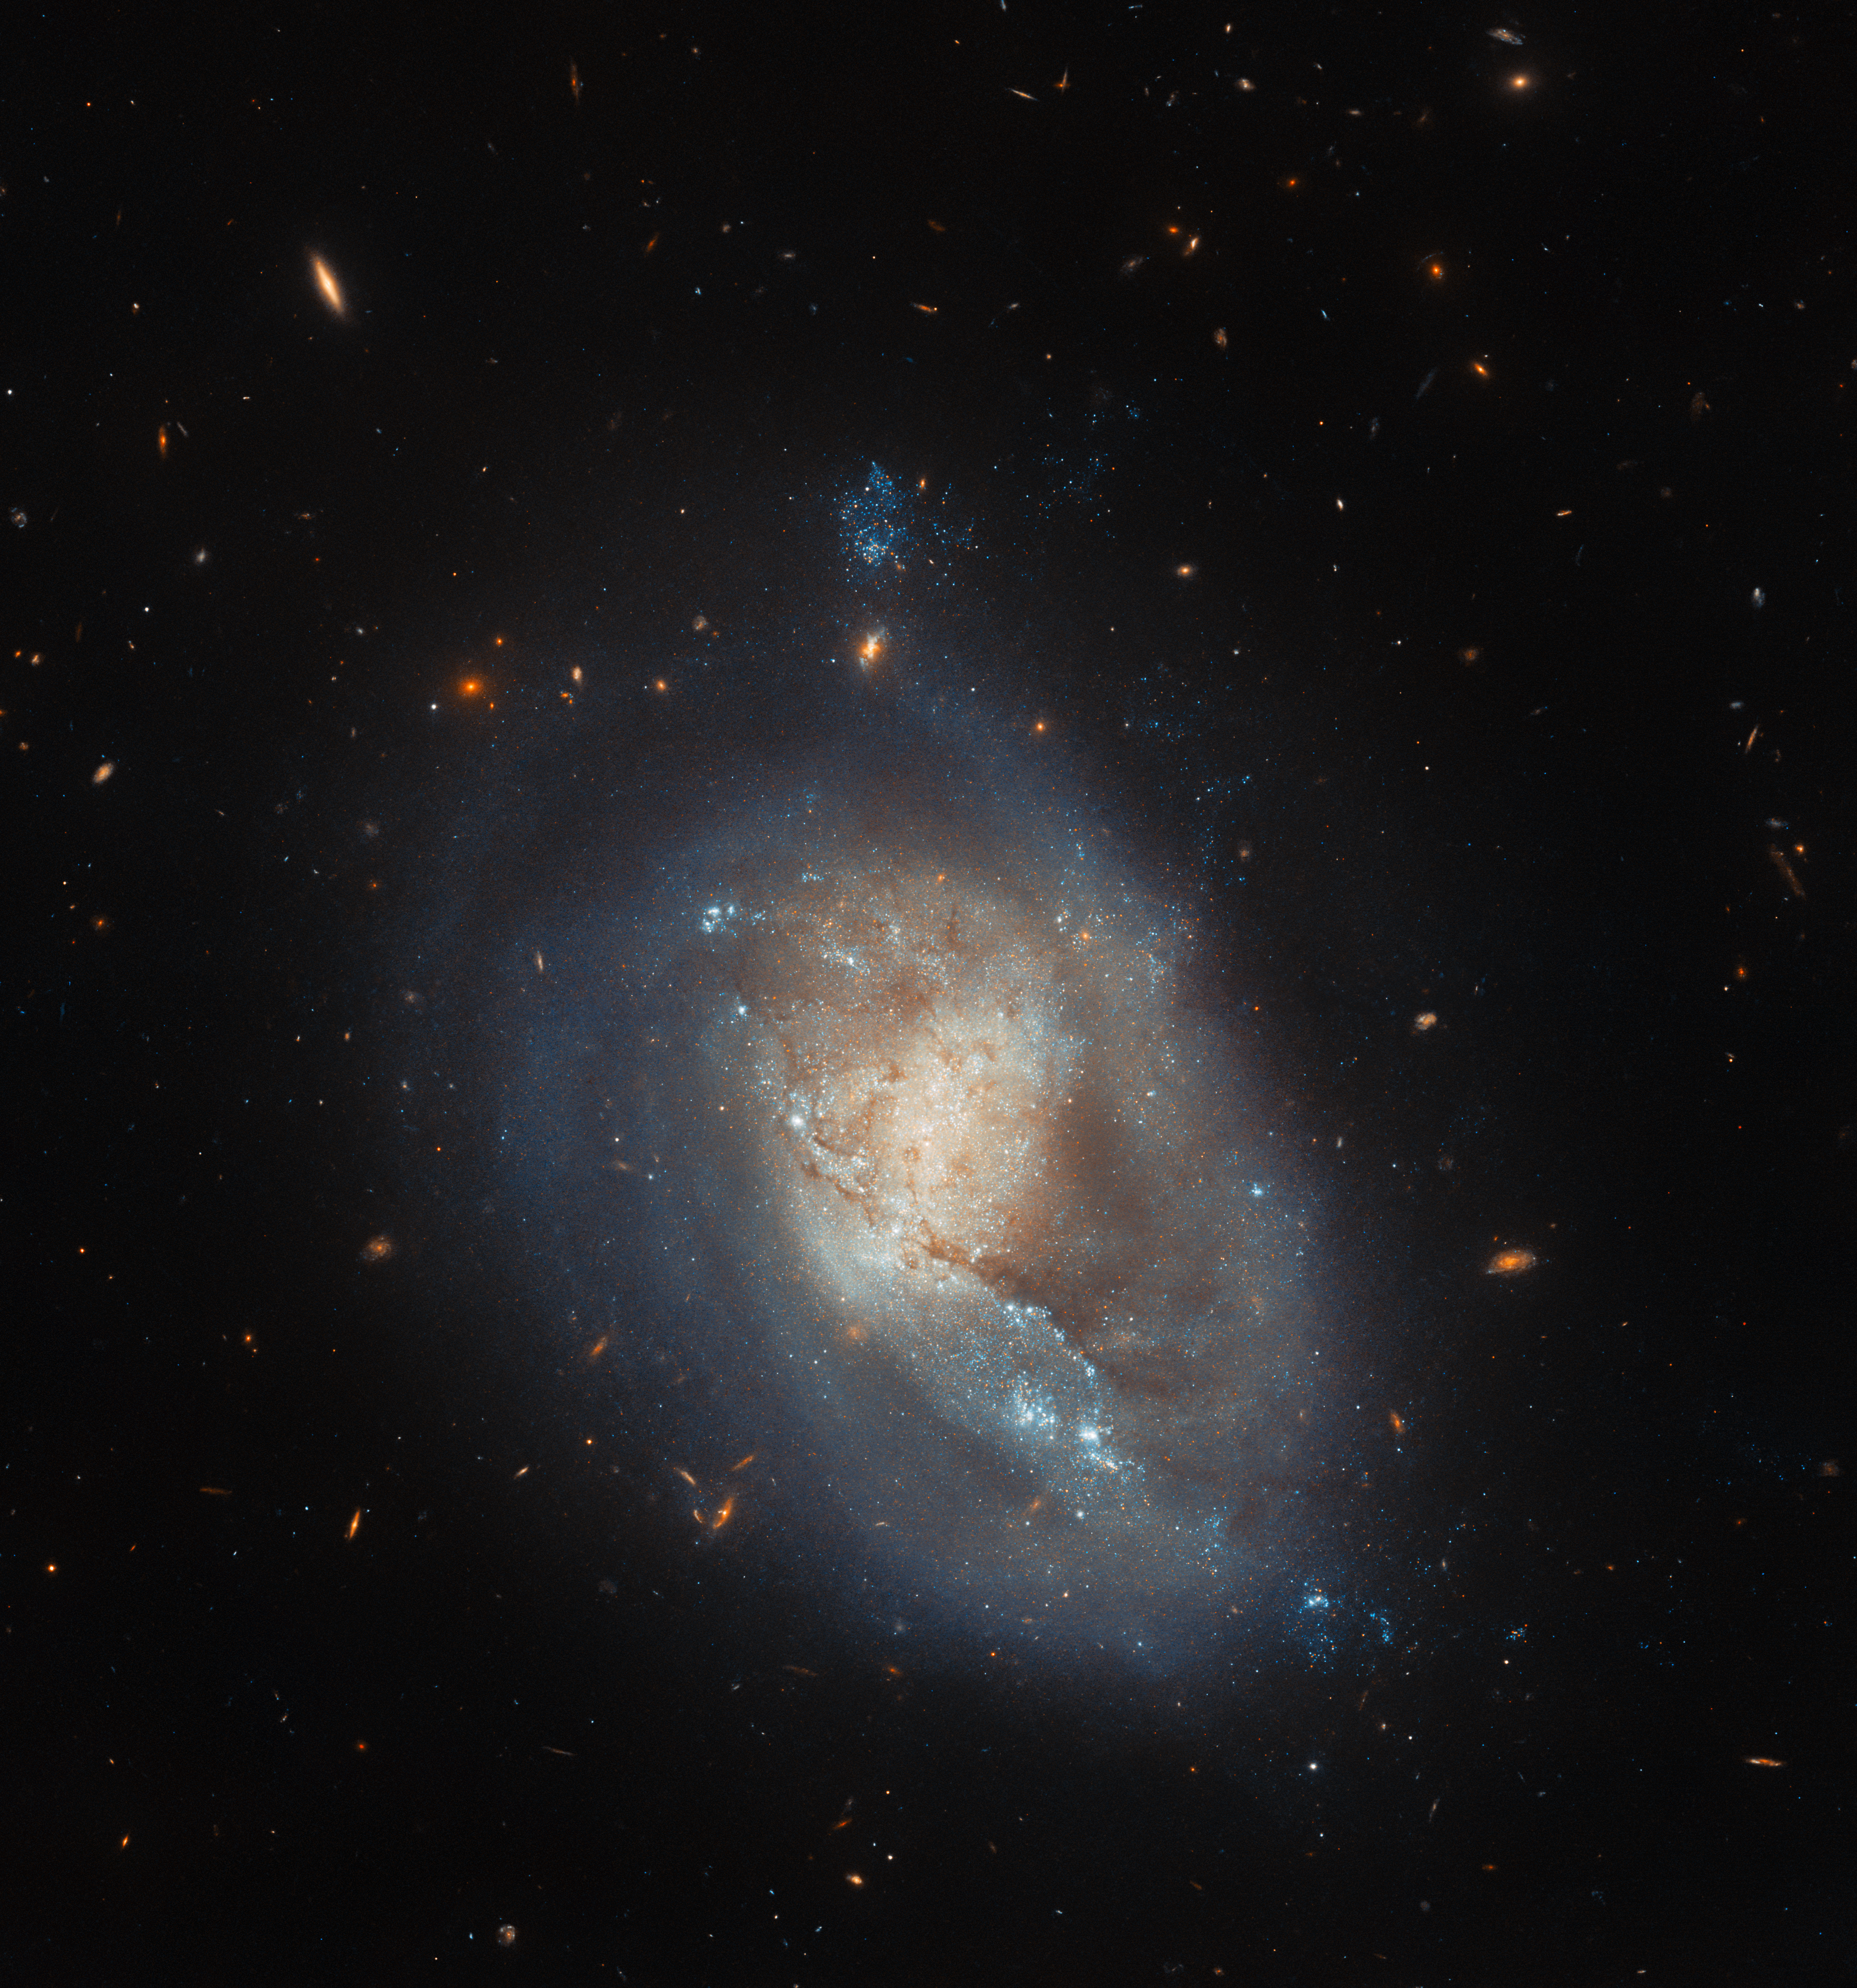

A high amount of ram

This image features IC 3476, a dwarf galaxy that lies about 54 million light-years from Earth in the constellation Coma Berenices. Whilst this image does not look very dramatic — if we were to anthropomorphise the galaxy, we might say it looks almost serene — the actual physical events taking place in IC 3476 are highly energetic. In fact, the little galaxy is undergoing a process known as ram pressure stripping, which is driving unusually high levels of star formation within regions of the galaxy itself.

We tend to associate the letters ‘ram’ with the acronym RAM, which refers to Random Access Memory in computing. However, ram pressure has a totally distinct definition in physics: it is the pressure exerted on a body when it moves through some form of fluid, due to the overall resistance of the fluid. In the case of entire galaxies experiencing ram pressure, the galaxies are the ‘bodies’ and the intergalactic or intracluster medium (the dust and gas that permeates the space between galaxies, and for the latter the spaces between galaxies in clusters) is the ‘fluid’.

Ram pressure stripping occurs when the ram pressure results in gas being stripped from the galaxy. This stripping away of gas can lead to a reduction in the level of star formation, or even its complete cessation, as gas is absolutely key to the formation of stars. However, the ram pressure can also cause other parts of the galaxy to be compressed, which can actually boost star formation. This is what seems to be taking place in IC 3476: there seems to be absolutely no star formation going on at the edge of the galaxy bearing the brunt of the ram pressure stripping, but then star formation rates within deeper regions of the galaxy seem to be markedly above the average.

Credit: ESA/Hubble & NASA, M. Sun